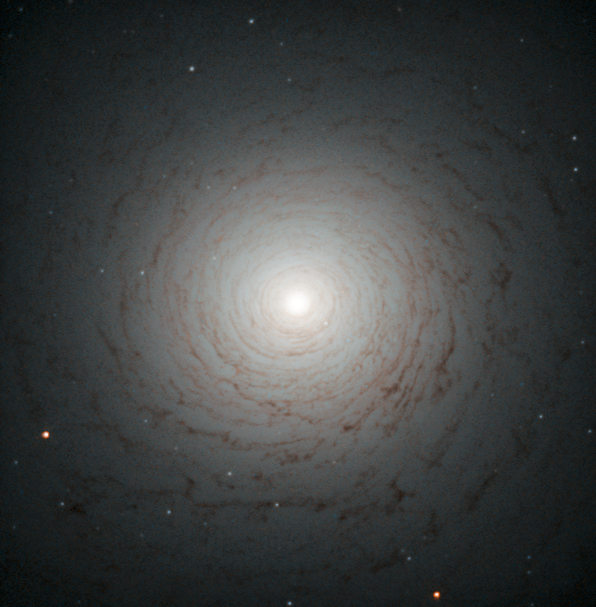

A mysterious old spiral

This striking cosmic whirl is the centre of galaxy NGC 524, as seen with the NASA/ESA Hubble Space Telescope. This galaxy is located in the constellation of Pisces, some 90 million light-years from Earth.

NGC 524 is a lenticular galaxy. Lenticular galaxies are believed to be an intermediate state in galactic evolution — they are neither elliptical nor spiral. Spirals are middle-aged galaxies with vast, pinwheeling arms that contain millions of stars. Along with these stars are large clouds of gas and dust that, when dense enough, are the nurseries where new stars are born. When all the gas is either depleted or lost into space, the arms gradually fade away and the spiral shape begins to weaken. At the end of this process, what remains is a lenticular galaxy — a bright disc full of old, red stars surrounded by what little gas and dust the galaxy has managed to cling on to.

This image shows the shape of NGC 524 in detail, formed by the remaining gas surrounding the galaxy’s central bulge. Observations of this galaxy have revealed that it maintains some spiral-like motion, explaining its intricate structure.

A version of this image was entered into the Hubble’s Hidden Treasures image processing competition by contestant Judy Schmidt.

Credit: ESA/Hubble & NASA Acknowledgement: Judy Schmidt